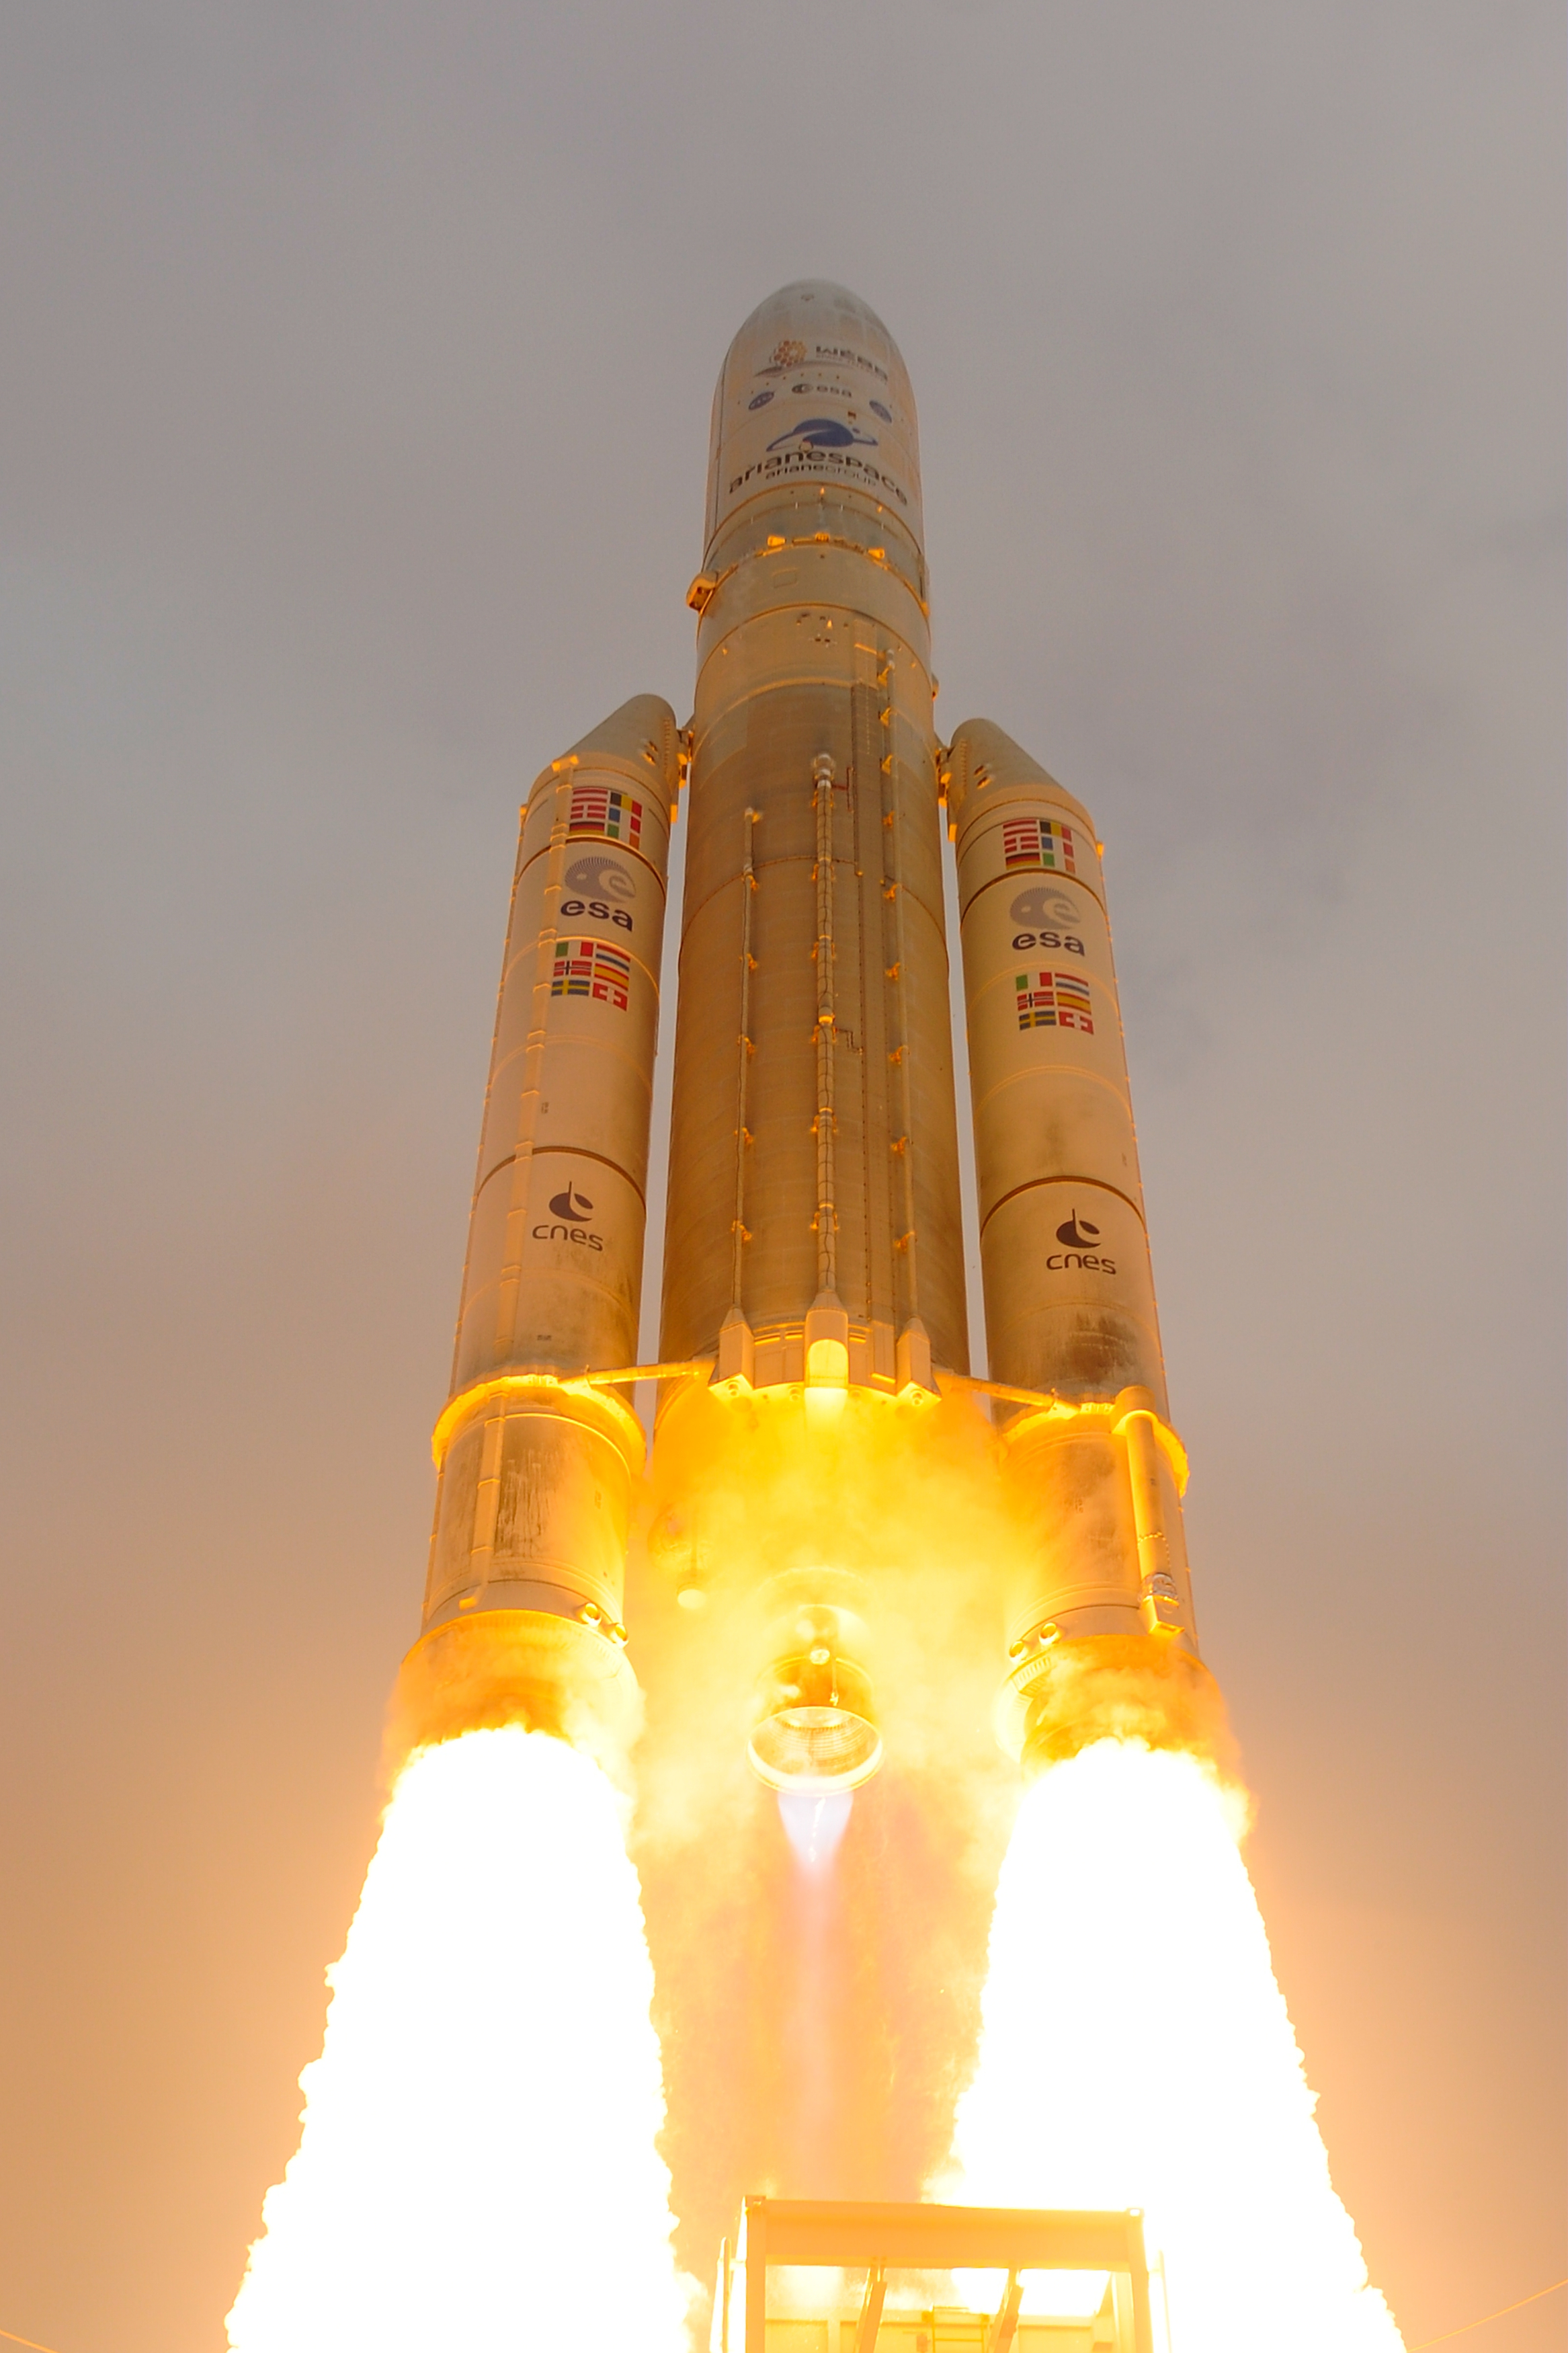

Webb liftoff on Ariane 5

The James Webb Space Telescope lifted off on an Ariane 5 rocket from Europe’s Spaceport in French Guiana, at 13:20 CET on 25 December on its exciting mission to unlock the secrets of the Universe.

Credit: ESA - S. Corvaja